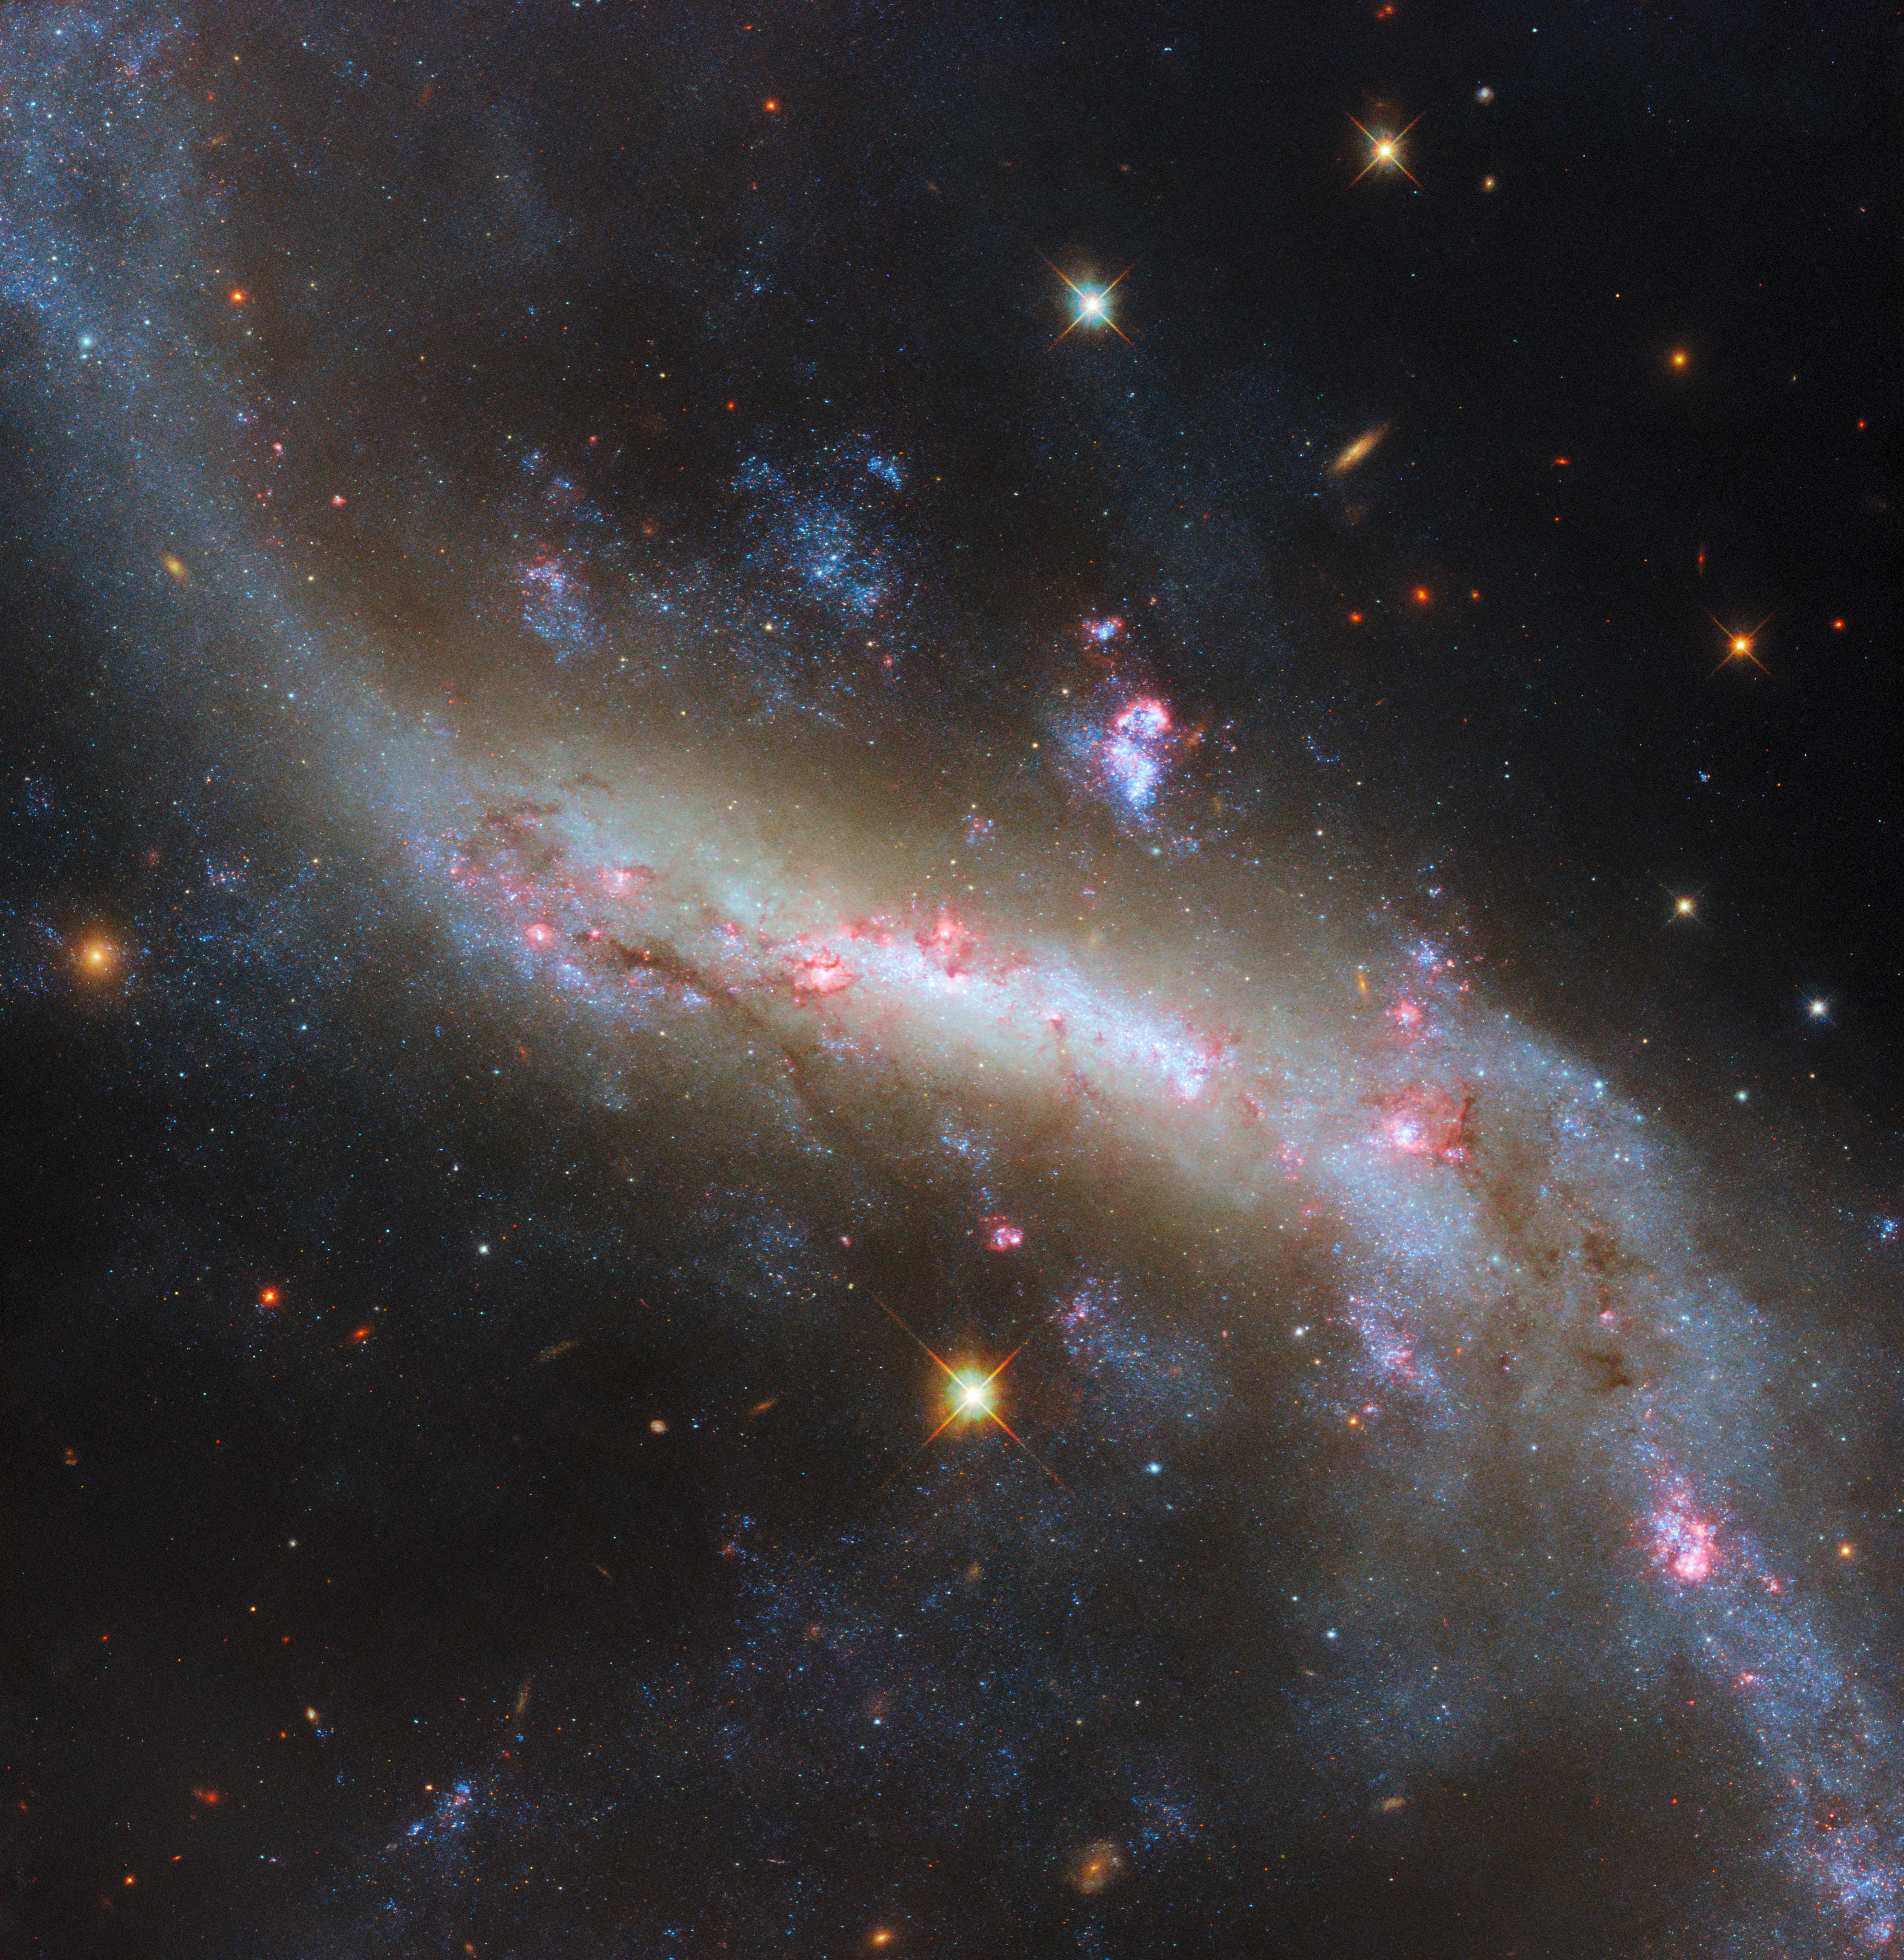

The lights of a galactic bar

This week, an image of the broad and sweeping spiral galaxy NGC 4731 is the Hubble Picture of the Week. This galaxy lies among the galaxies of the Virgo cluster, in the constellation Virgo, and is located 43 million light-years from Earth. This highly detailed image was created using six different filters. The abundance of colour illustrates the galaxy's billowing clouds of gas, dark dust bands, bright pink star-forming regions and, most obviously, the long, glowing bar with trailing arms.

Barred spiral galaxies outnumber both regular spirals and elliptical galaxies put together, numbering around 60% of all galaxies. The visible bar structure is a result of orbits of stars and gas in the galaxy lining up, forming a dense region that individual stars move in and out of over time. This is the same process that maintains a galaxy's spiral arms, but it is somewhat more mysterious for bars: spiral galaxies seem to form bars in their centres as they mature, accounting for the large number of bars we see today, but can also lose them later on as the accumulated mass along the bar grows unstable. The orbital patterns and the gravitational interactions within a galaxy that sustain the bar also transport matter and energy into it, fuelling star formation. Indeed, the observing programme studying NGC 4731 seeks to investigate this flow of matter in galaxies.

Beyond the bar, the spiral arms of NGC 4731 stretch out far past the confines of this close-in Hubble view. The galaxy’s elongated arms are thought to result from gravitational interactions with other, nearby galaxies in the Virgo cluster.

Credit: ESA/Hubble & NASA, D. Thilker